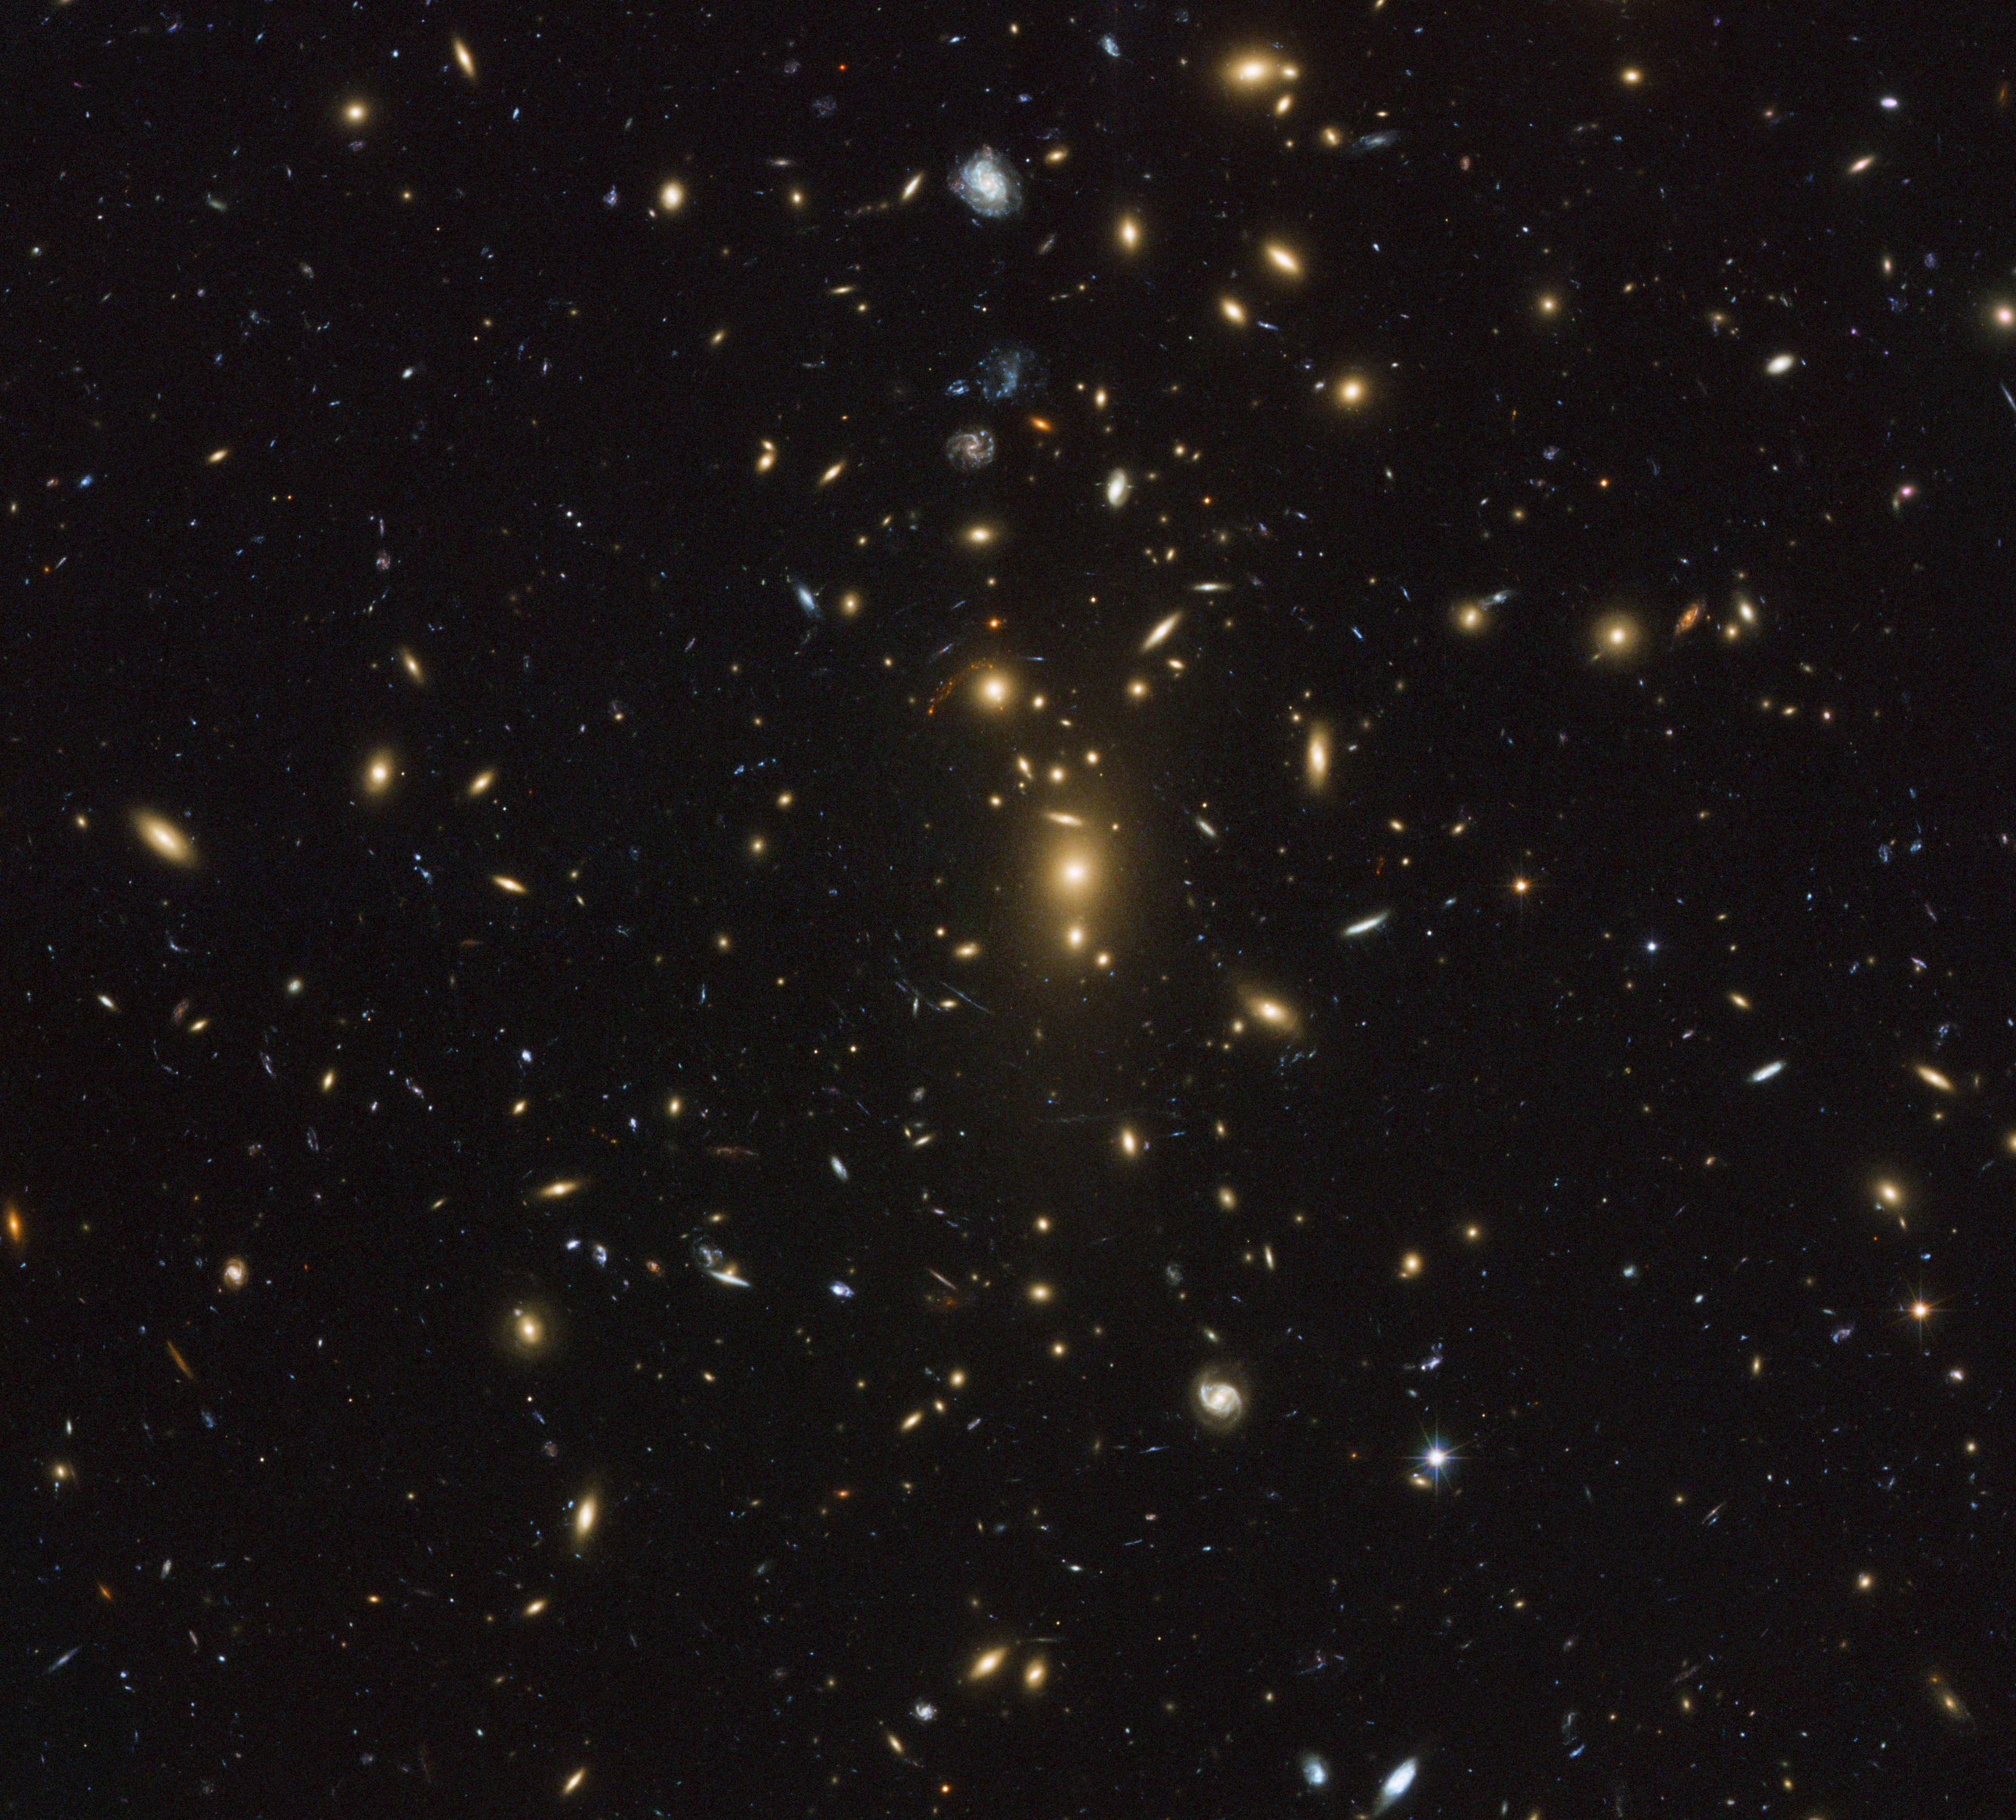

ZwCl 1358+62

ZwCl 1358+62 is located 3.7 billion light-years from Earth (z=0.33) and is made up of at least 150 individual galaxies. This image depicts multiple blue, red and orange arcs scattered across the image, which represent amplified and stretched images of the galaxies behind the cluster's core. The colours displayed by the various lensed galaxies vary according to their distance and galaxy types. The natural gravitational lensing effect in combination with Hubble's potent mirrors provide astronomers with a powerful set of tools to gather information on the nature of distant galaxies and the workings of the "hidden" world around us.

Credit: NASA, ESA, and Johan Richard (Caltech, USA) Acknowledgement: Davide de Martin & James Long (ESA/Hubble)